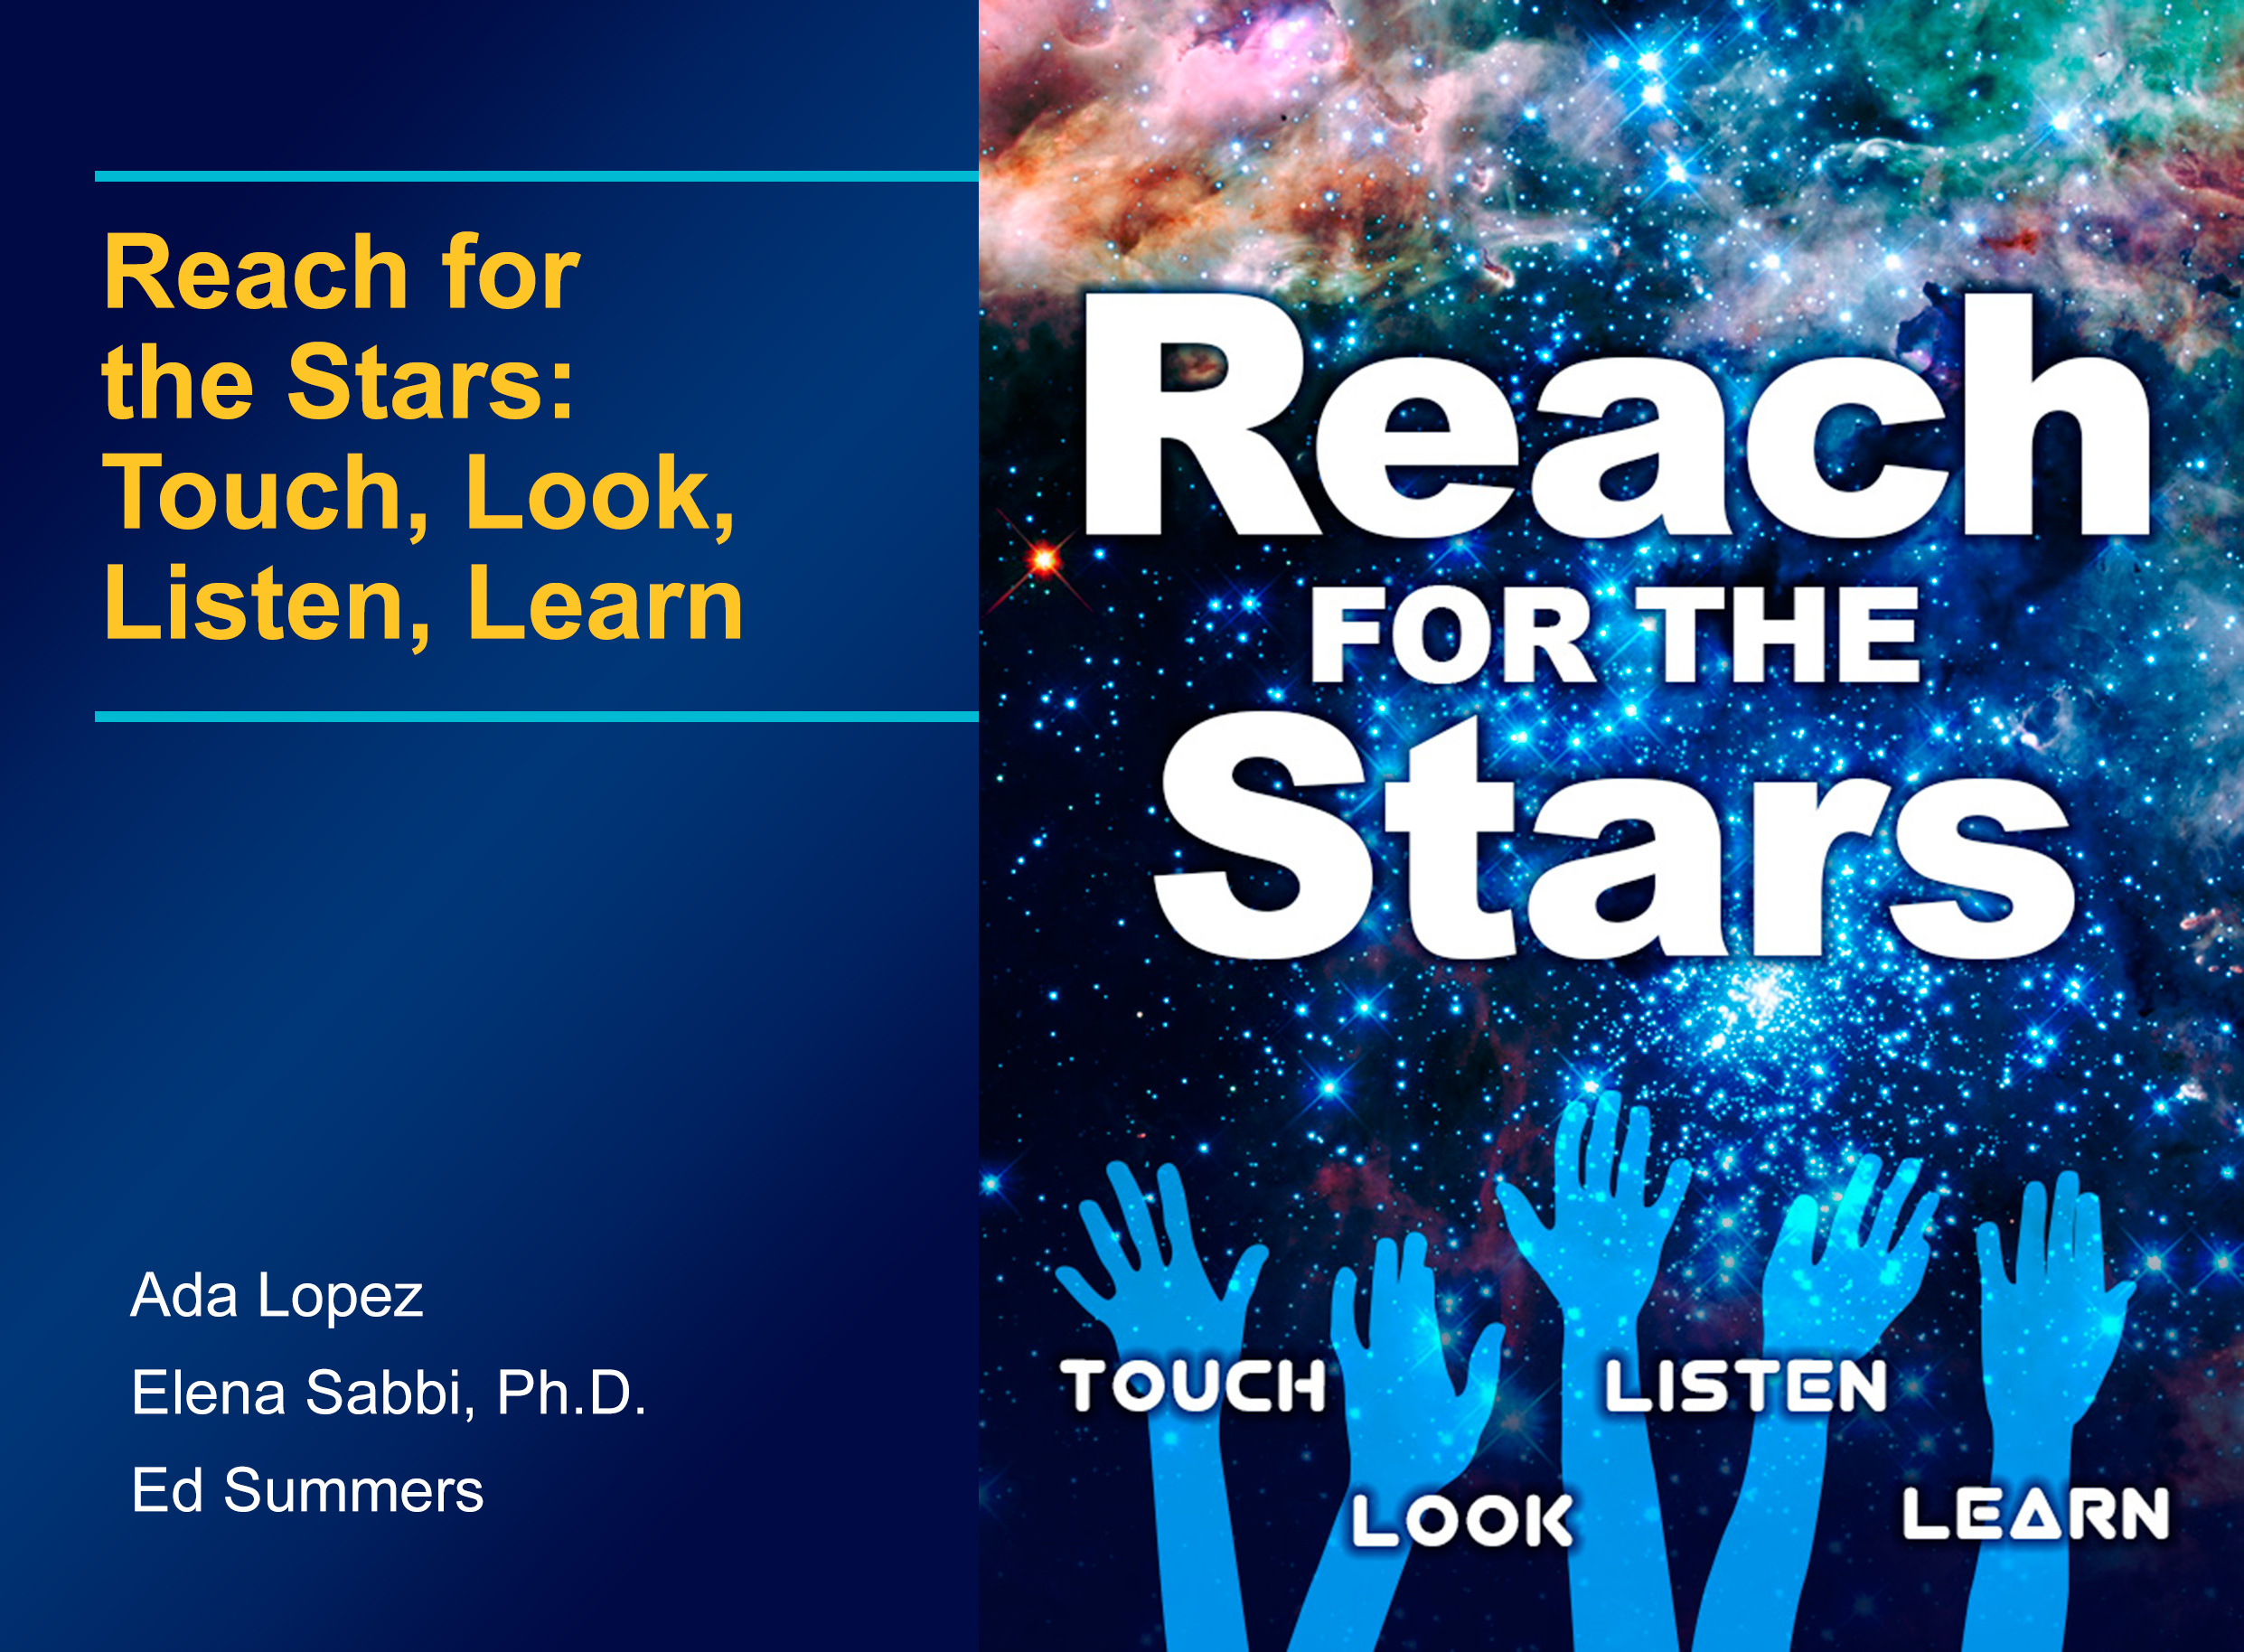

New e-book for the visually impaired makes astronomy accessible through touch and sound

Children with visual disabilities can experience striking deep-space images like never before in a free multi-touch iBooks textbook for the iPad entitled “Reach for the Stars: Touch, Look, Listen, Learn.”

Astronomers at the Space Telescope Science Institute (STScI) have teamed up with the SAS Corporation, the National Braille Press, and the National Federation for the Blind to create a book to inspire students of all abilities to pursue future careers in science. The book incorporates new assistive technologies to help the seeing impaired.

STScI astronomer Elena Sabbi worked with developers to translate colourful imagery from the NASA/ESA Hubble Space Telescope into content accessible to all students, including students with visual disabilities.

The development of the e-book is funded by a Hubble education and public outreach grant.

Credit: NASA, ESA, STScI, SAS, NBP, and NFB